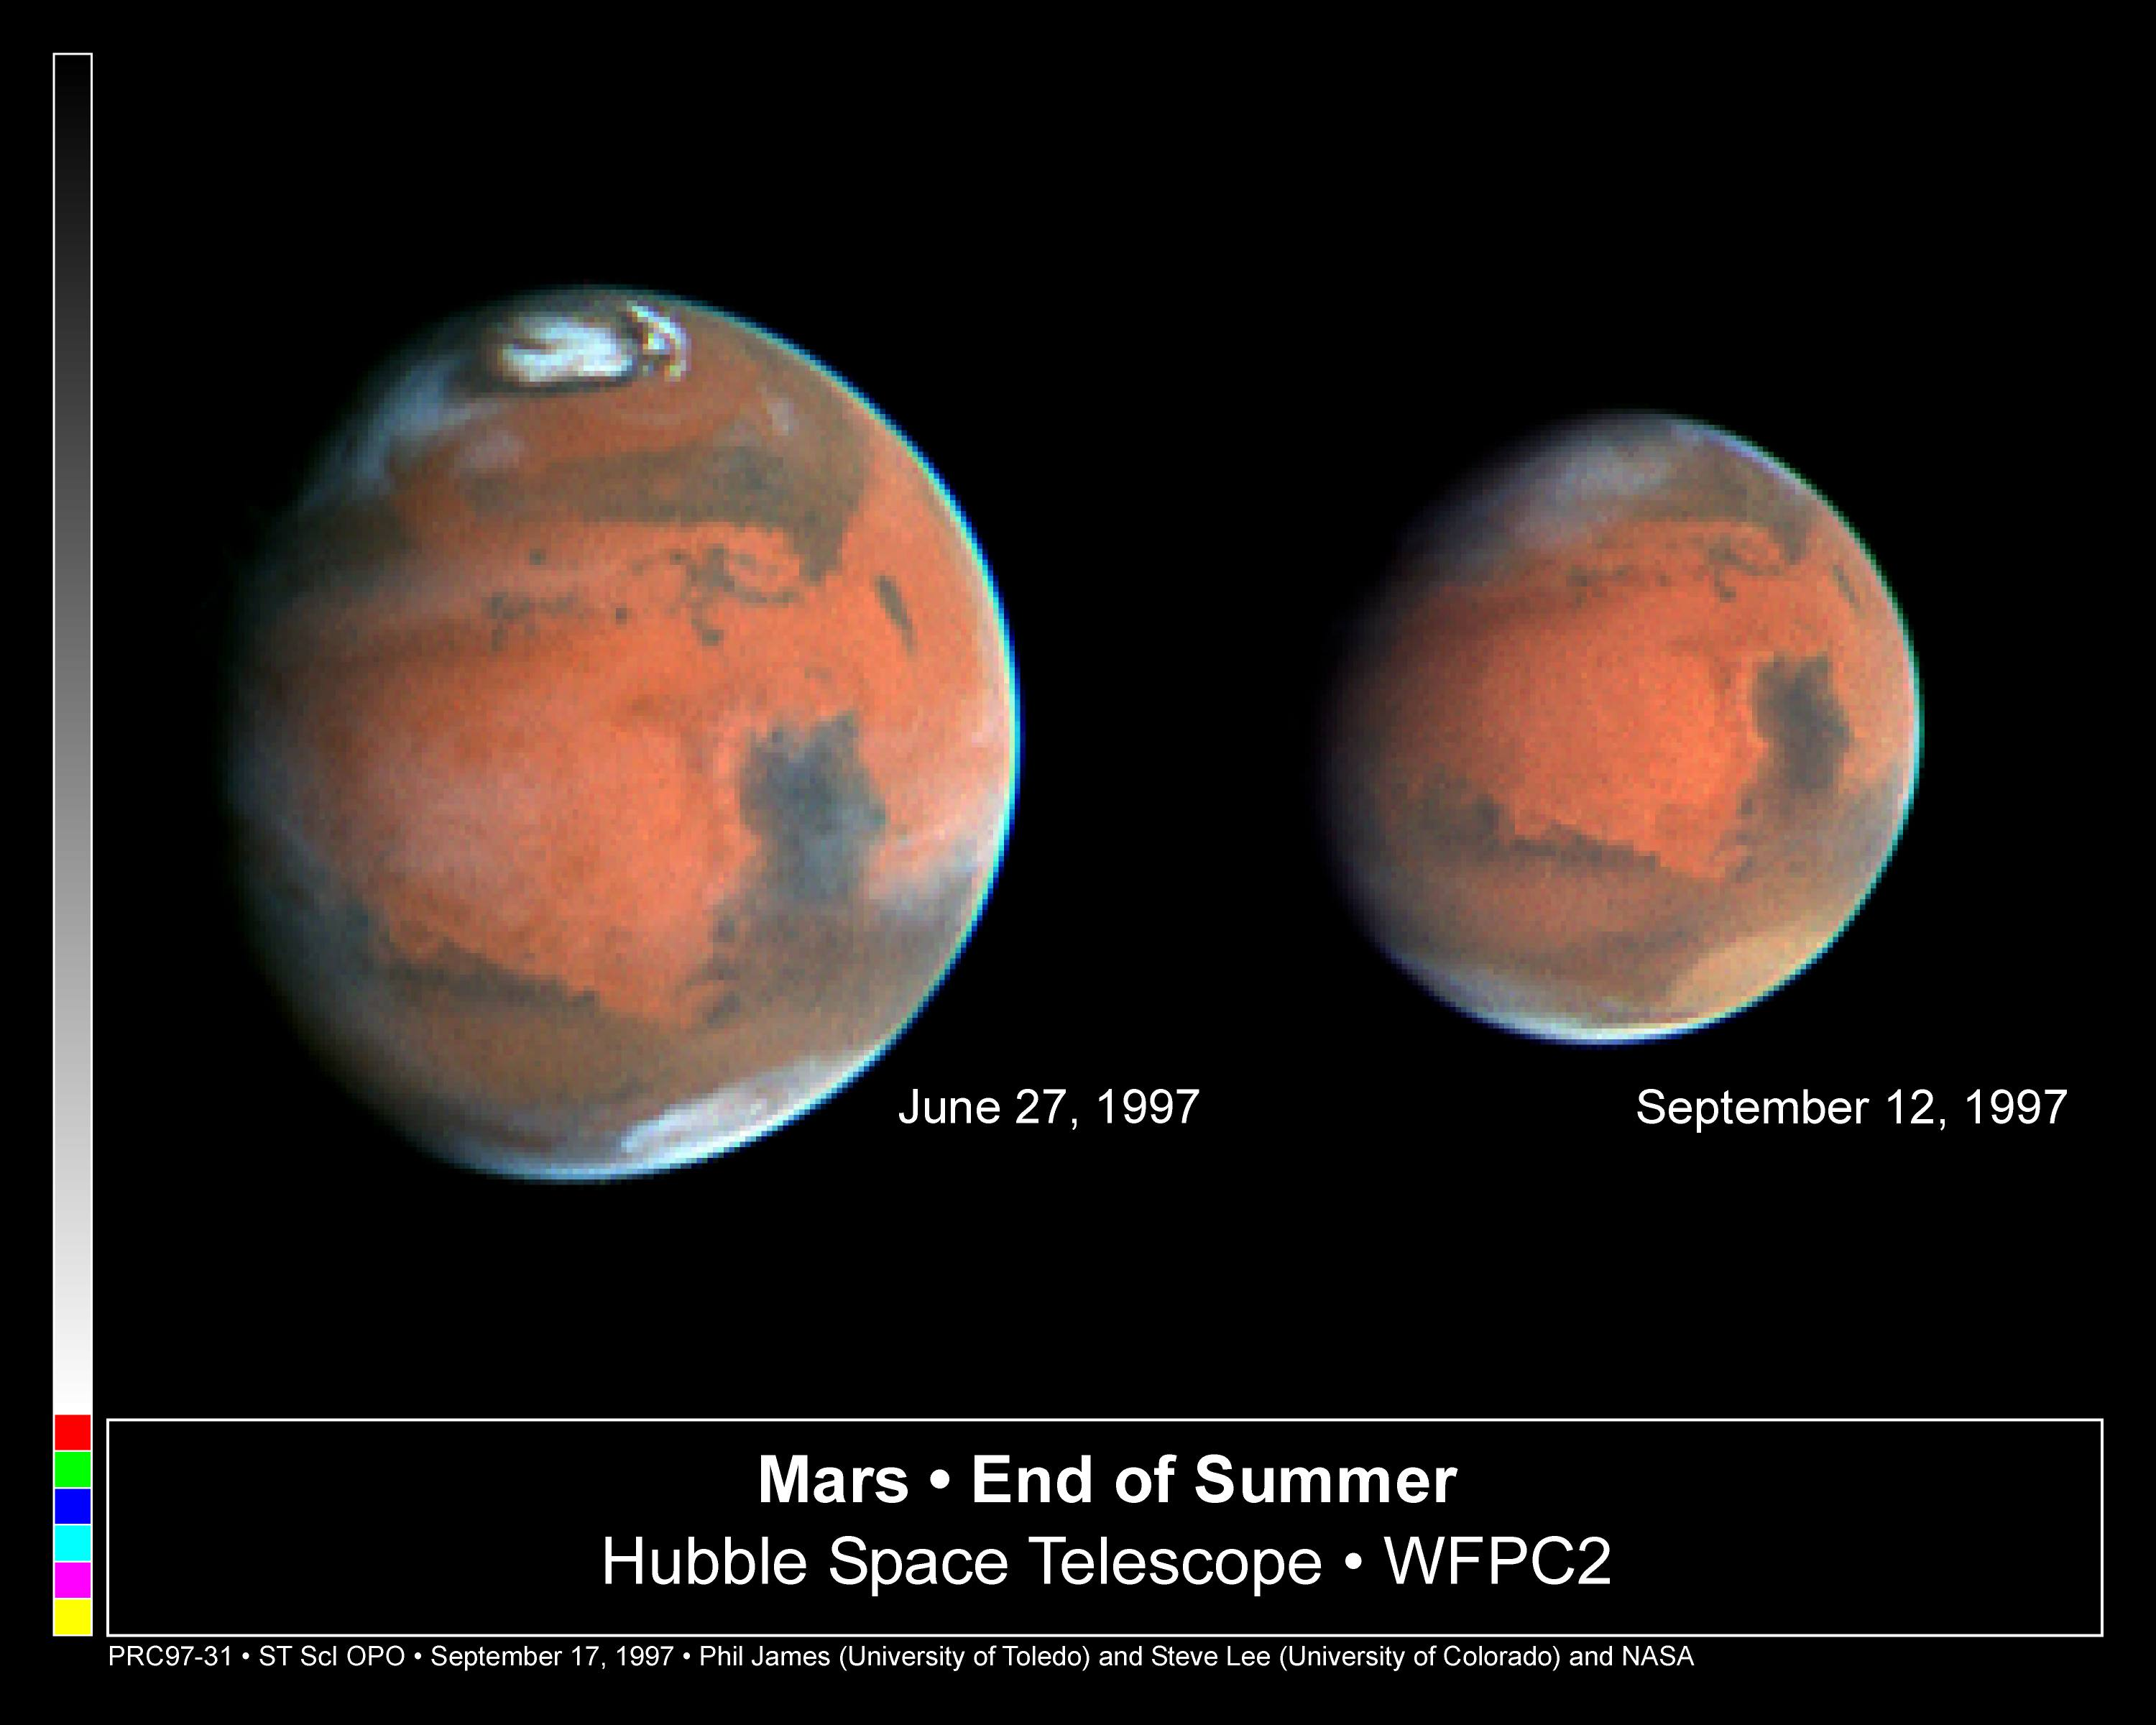

Mars Heading Towards Autumn as Mars Global Surveyor Begins Aerobraking

This NASA/ESA Hubble Space Telescope picture of Mars was taken on Sept. 12, one day after the arrival of the Mars Global Surveyor (MGS) spacecraft and only five hours before the beginning of autumn in the Martian northern hemisphere.

Credit: Phil James (Univ. Toledo) and Steve Lee (Univ. Colorado), and NASA/ESA